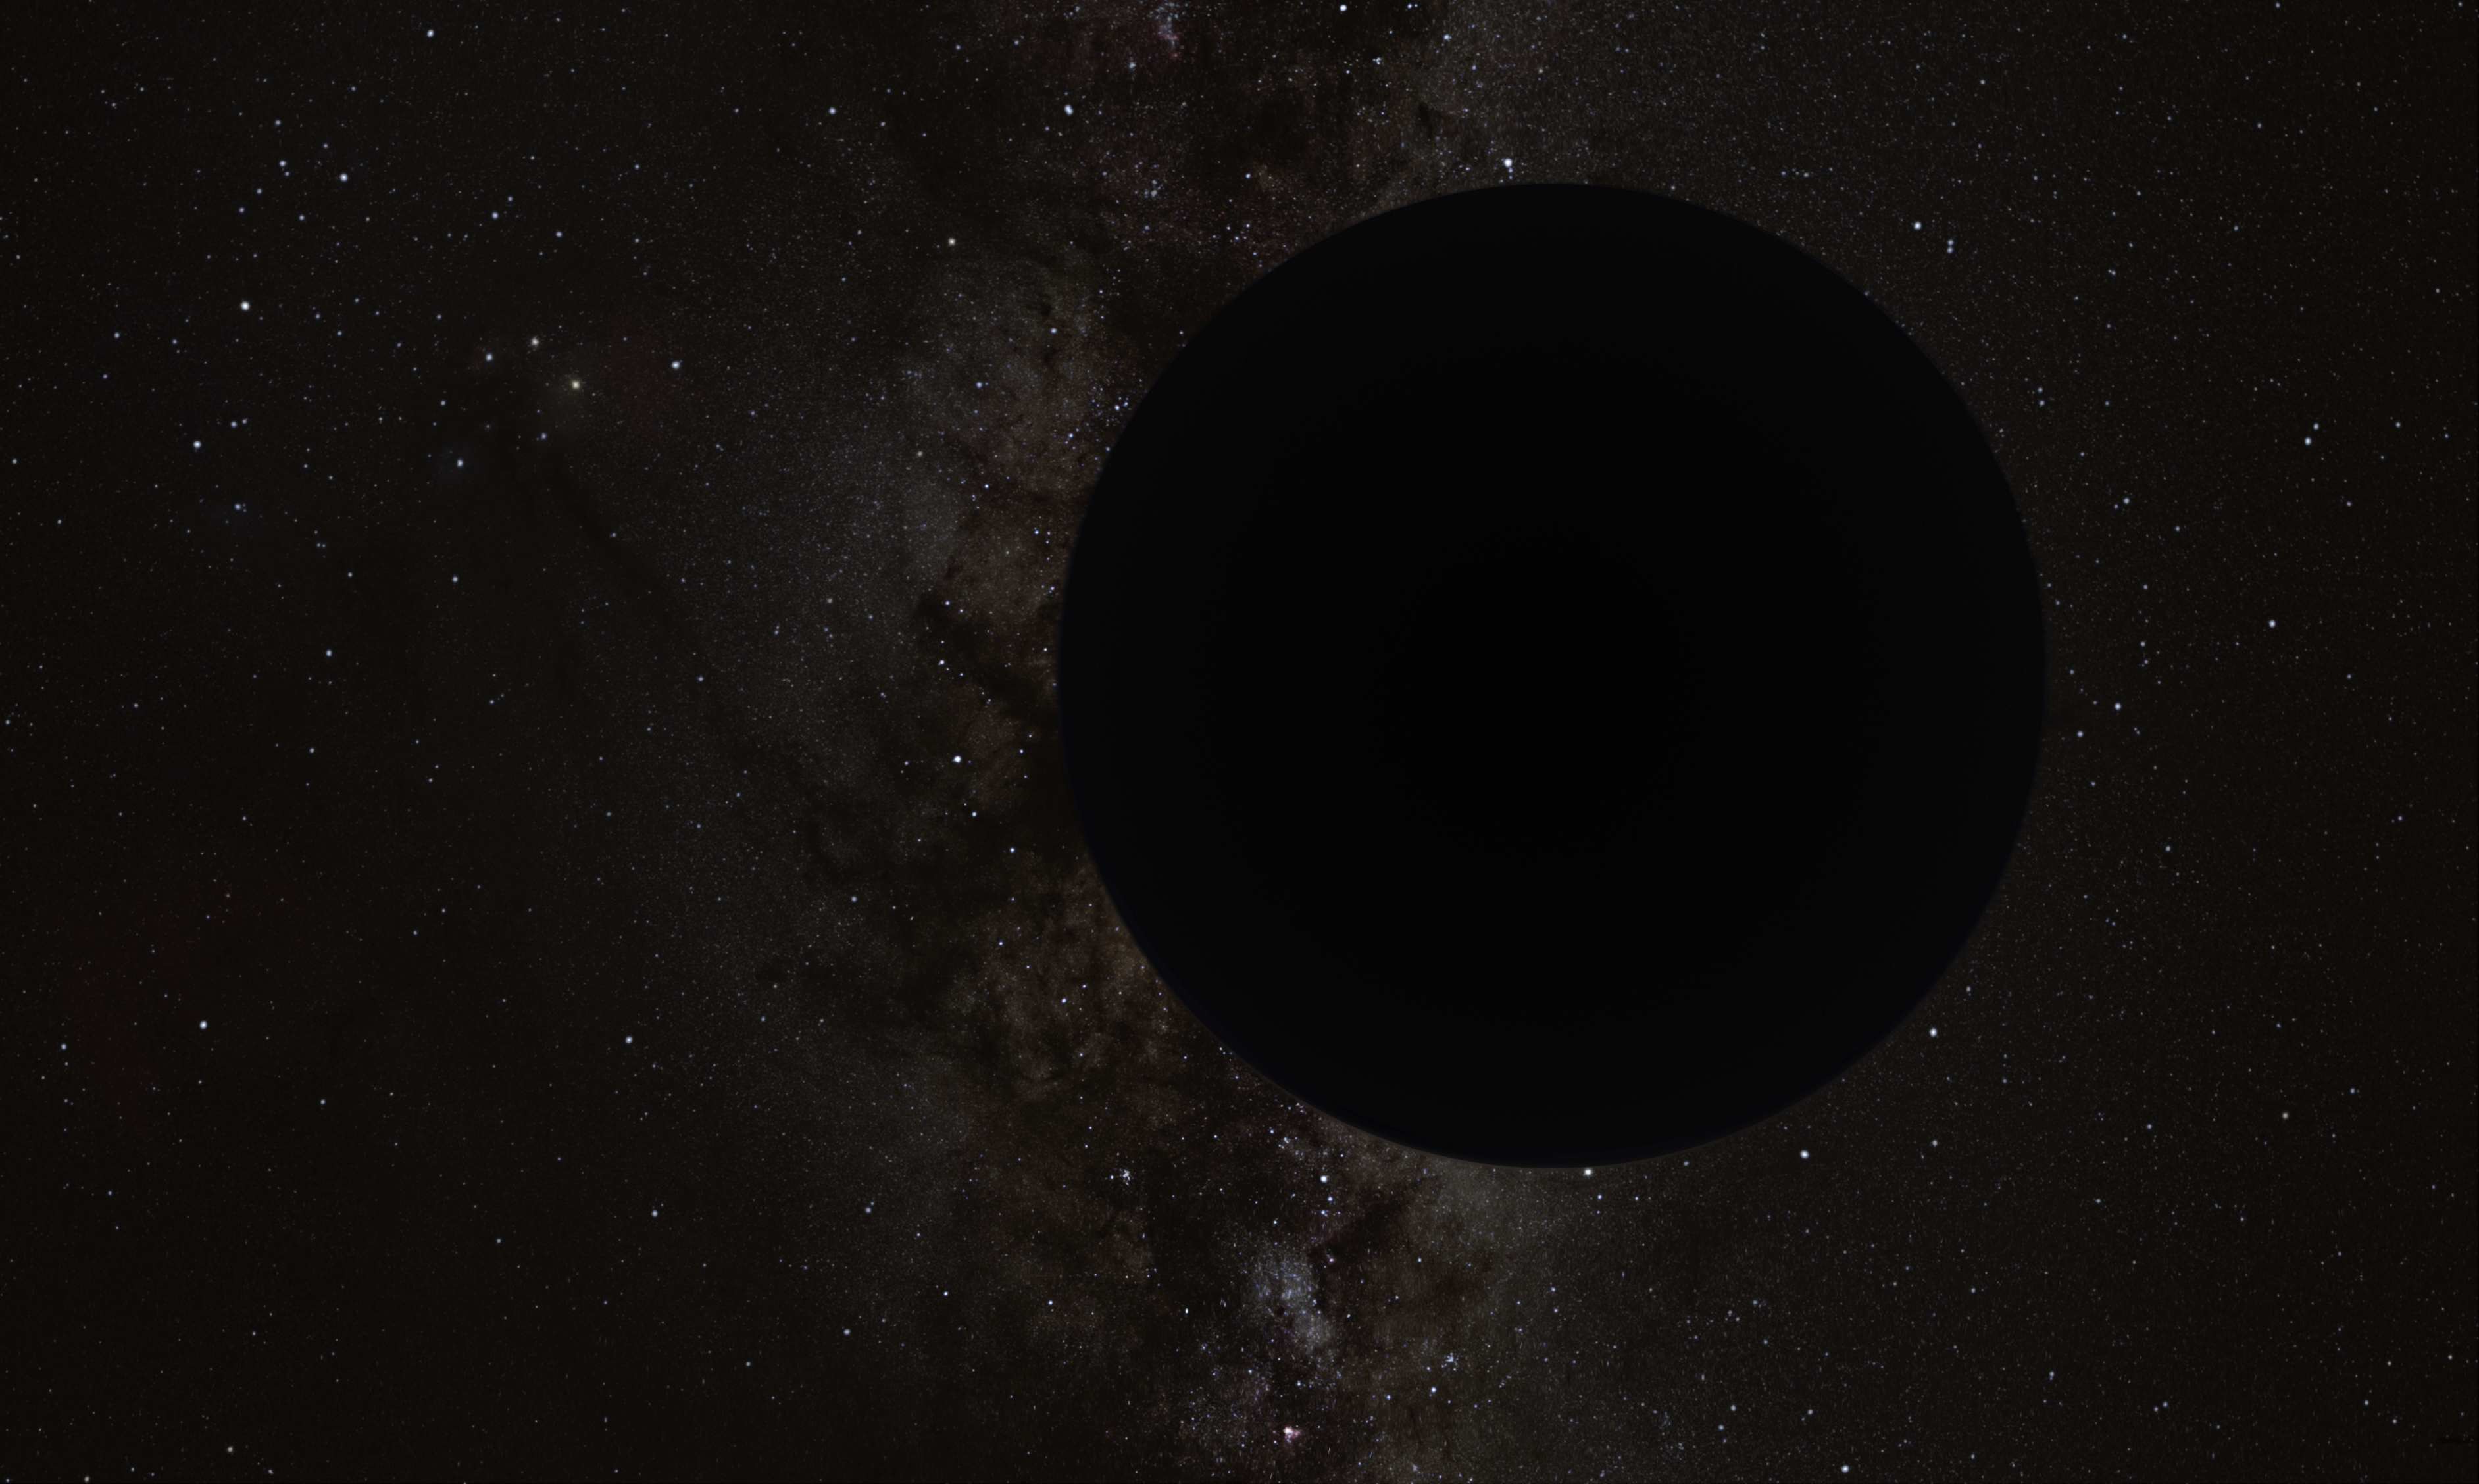

Artist’s Impression of the Hypothesized “Planet Nine”

An 11-Jupiter-mass exoplanet called HD106906 b occupies an unlikely orbit around a double star 336 light-years away and may be offering clues to something that might be much closer to home: a hypothesized distant member of our Solar System dubbed “Planet Nine.” This is the first time that astronomers have been able to measure the motion of a massive Jupiter-like planet that is orbiting very far away from its host stars and visible debris disc.

Credit: ESA/Hubble, M. Kornmesser